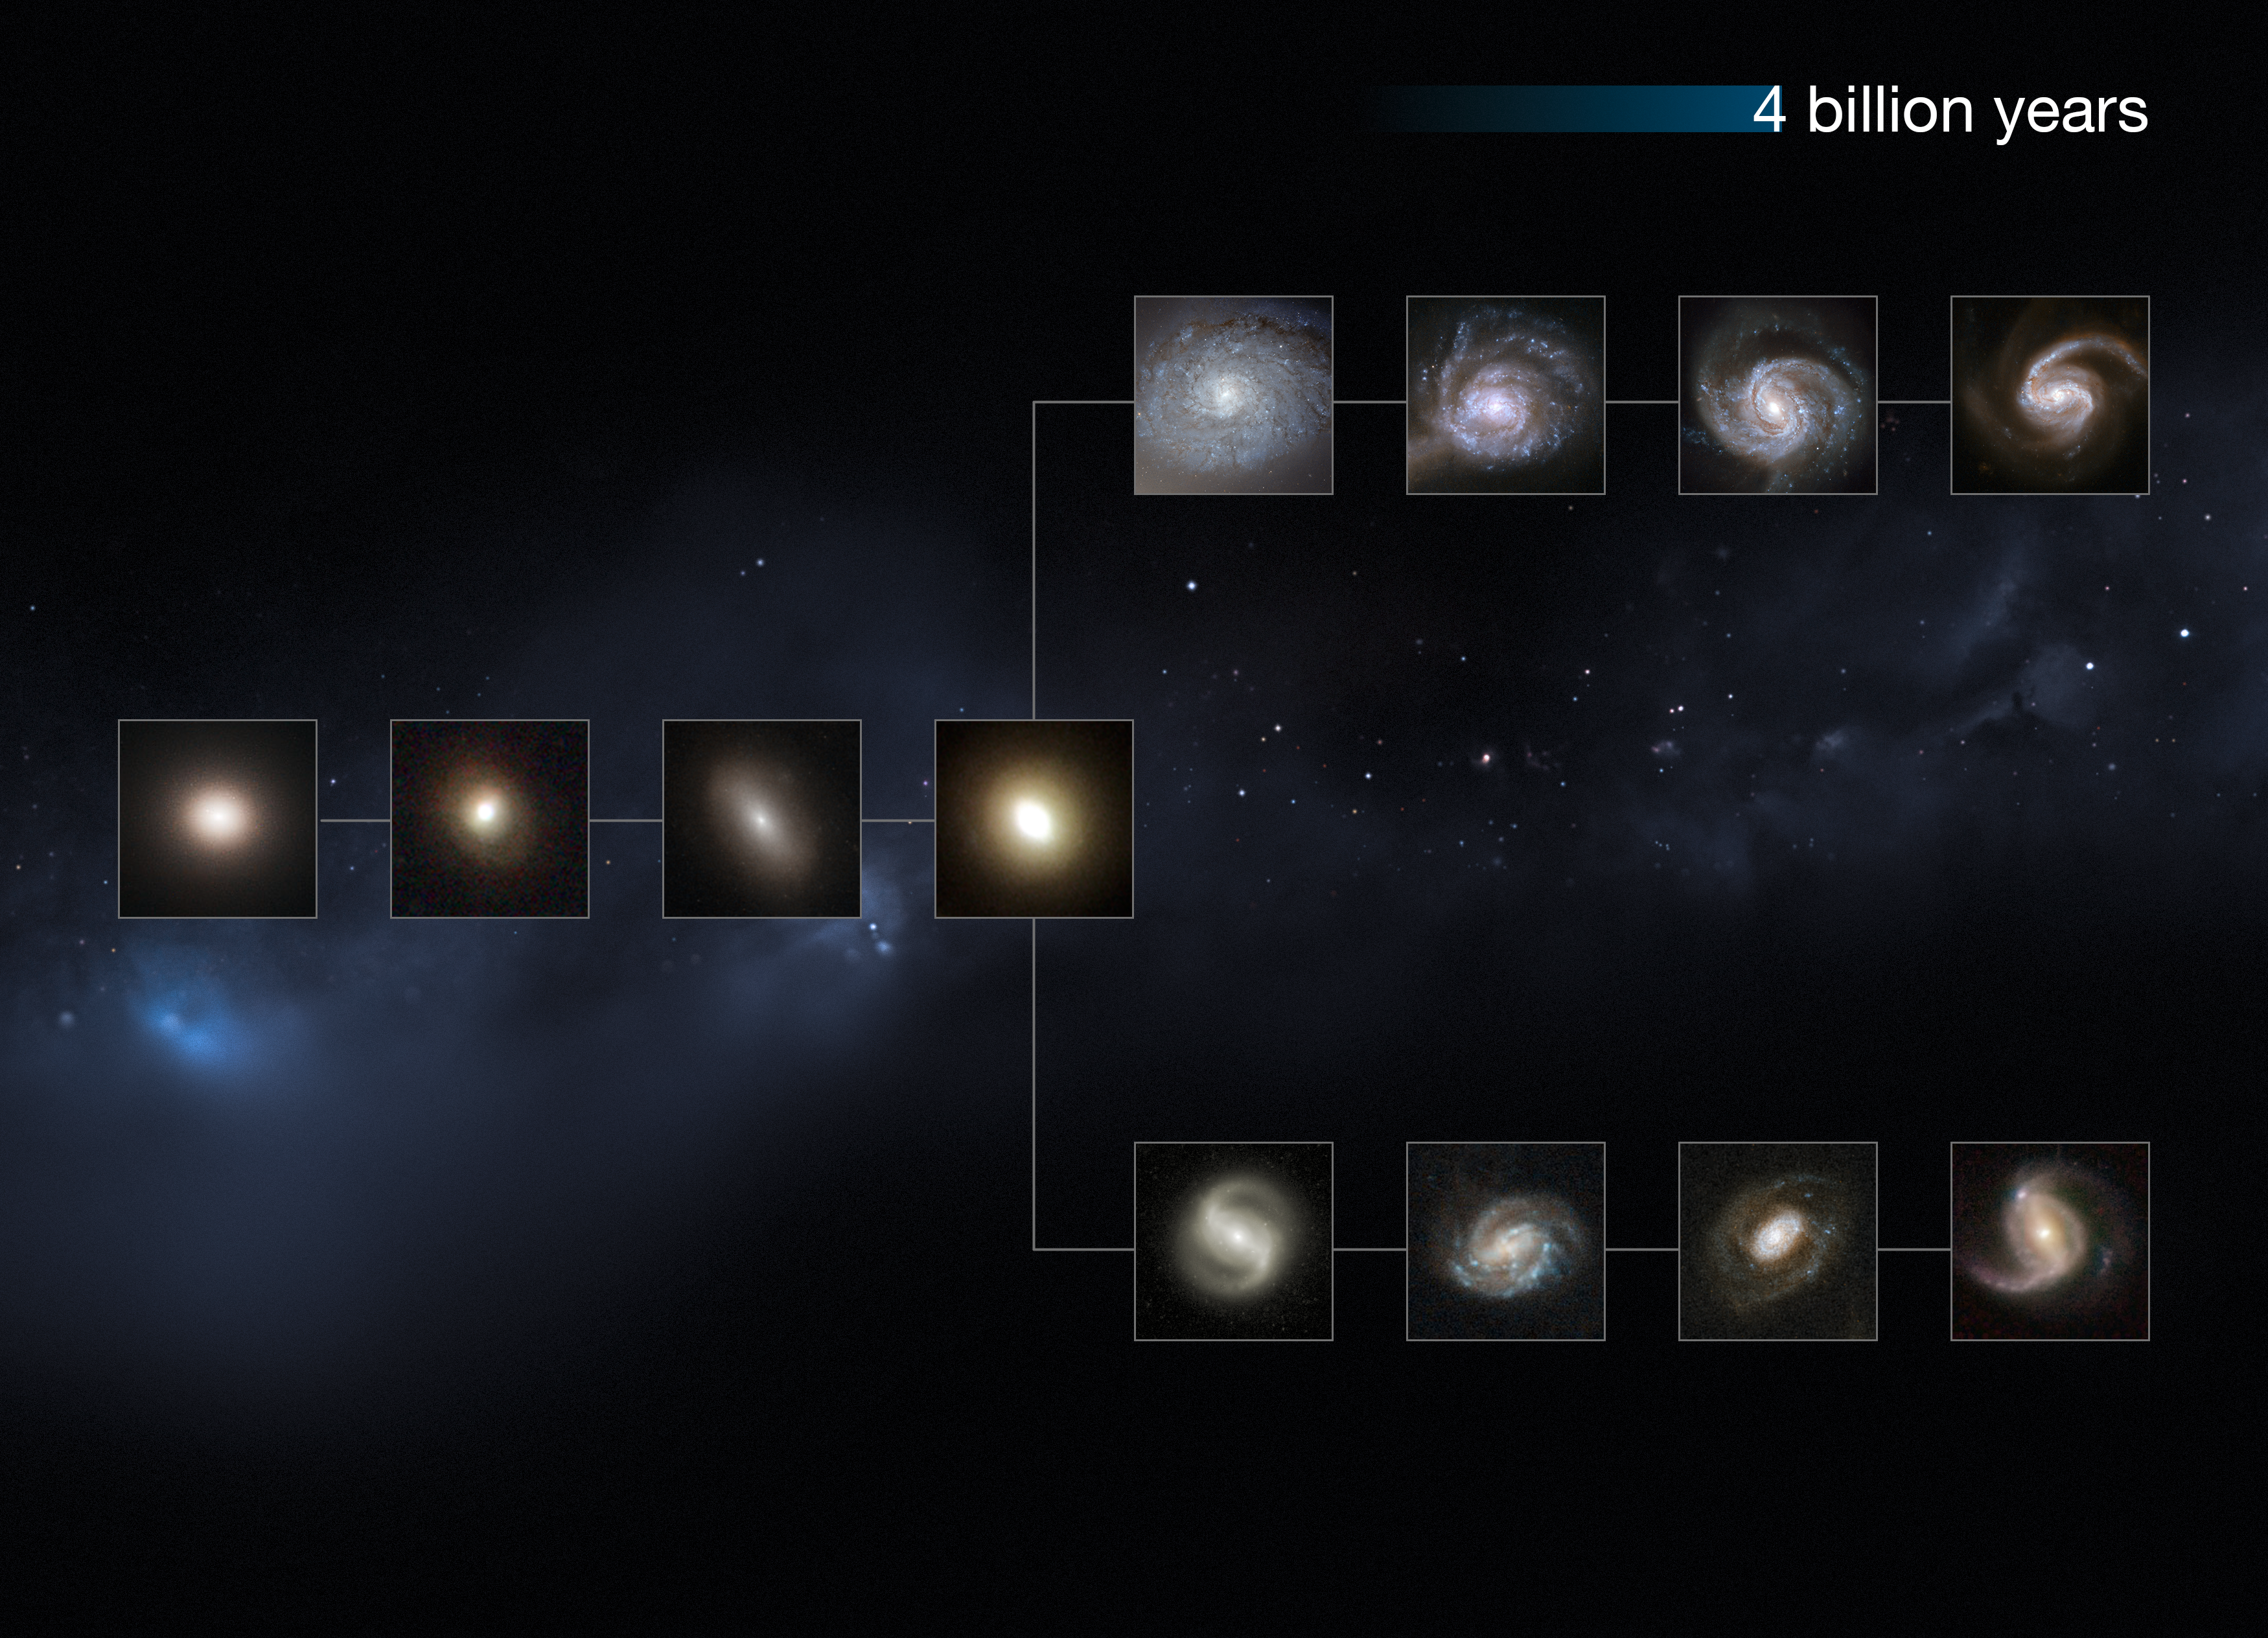

The Universe 4 billion years ago

This image shows a "slice" of the Universe some 4 billion years back in time. The shape is that of the Hubble tuning fork diagram, which describes and separates galaxies according to their morphology into spiral (S), elliptical (E), and lenticular (S0) galaxies. On the left of this diagram are the ellipticals, with lenticulars in the middle, and the spirals branching out on the right side. The spirals on the bottom branch have bars cutting through their centres. The galaxies at these distances from us are small and still not fully-formed, but have some defined colour and structure.

This image is illustrative; the Hubble images used were selected based on their appearance. The individual distances to these galaxies are only approximate.

Credit: NASA, ESA, M. Kornmesser